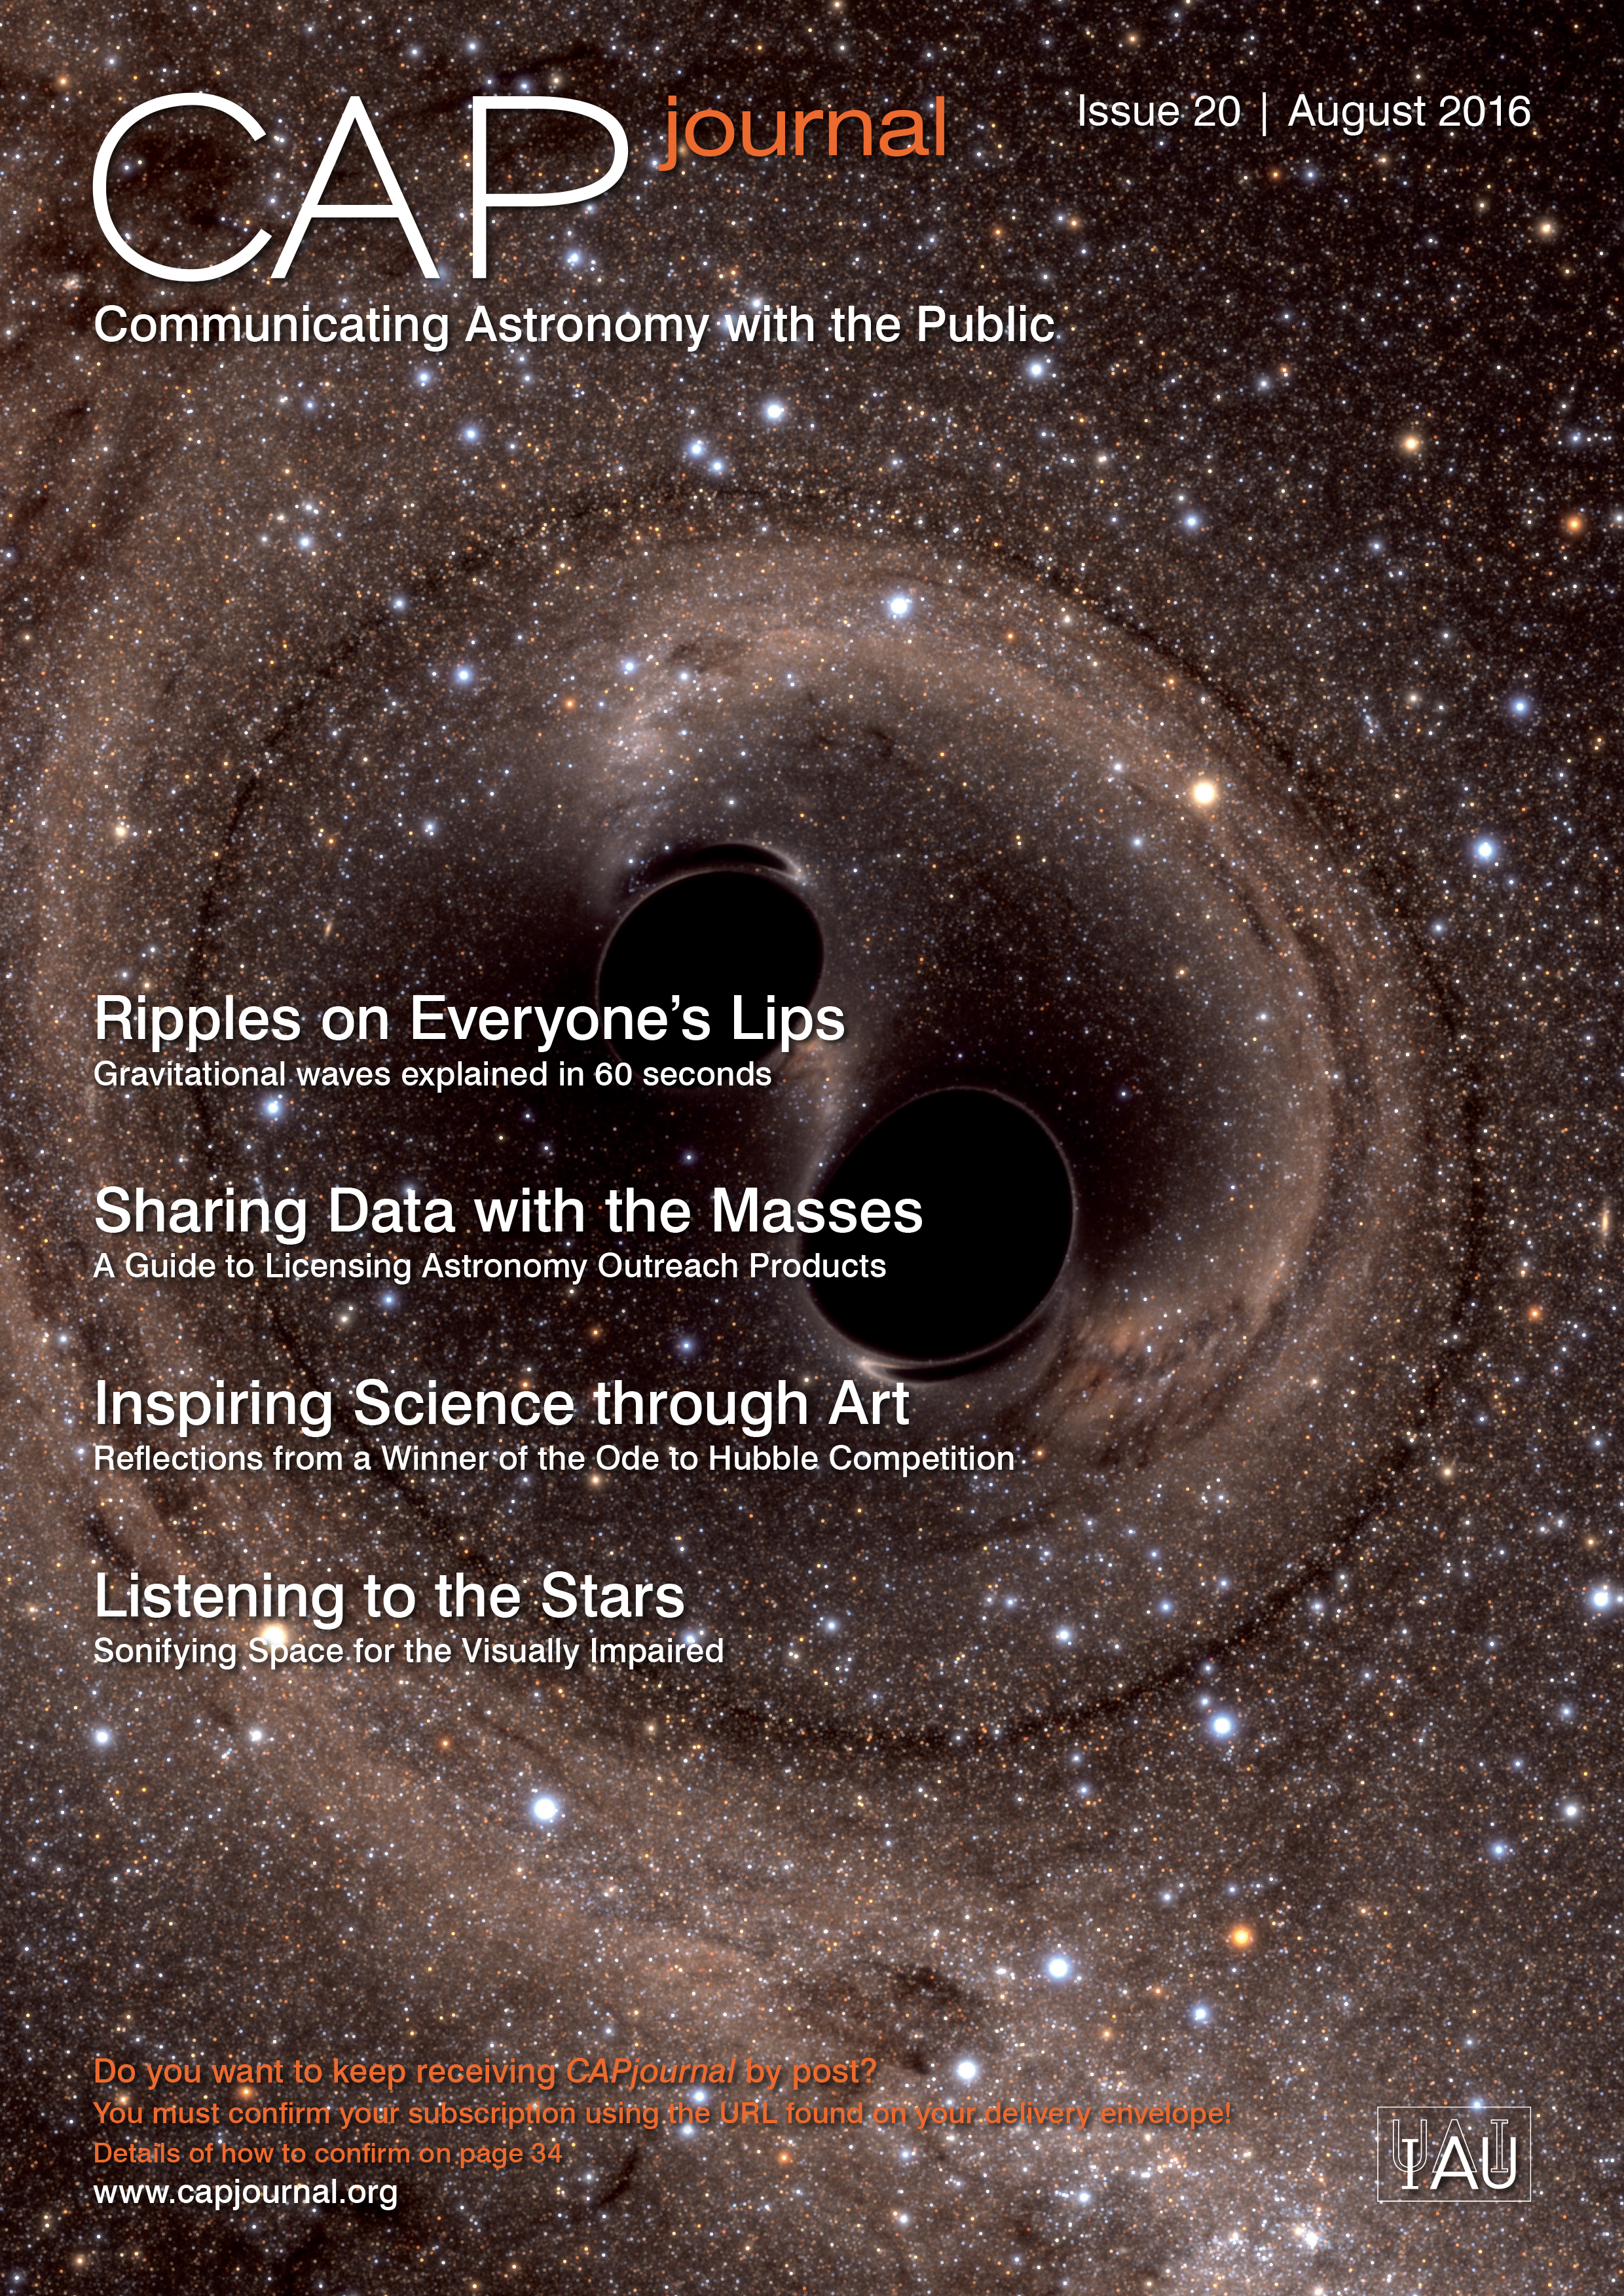

Cover picture of CAP Journal issue 20

Cover picture of CAP Journal issue 20

Credit: ESO/ESA/Hubble